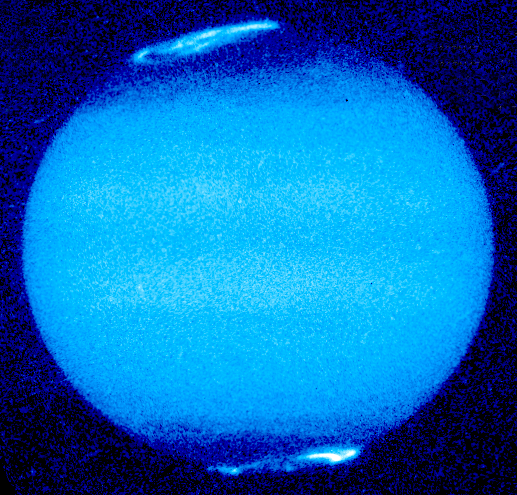

Jupiter's Aurora

In this image, the north auroral emission is rising over the left limb; the south auroral oval is beginning to set.

Credit: John T. Clarke and Gilda E. Ballester (University of Michigan), John Trauger and Robin Evans (Jet Propulsion Laboratory), and NASA/ESA